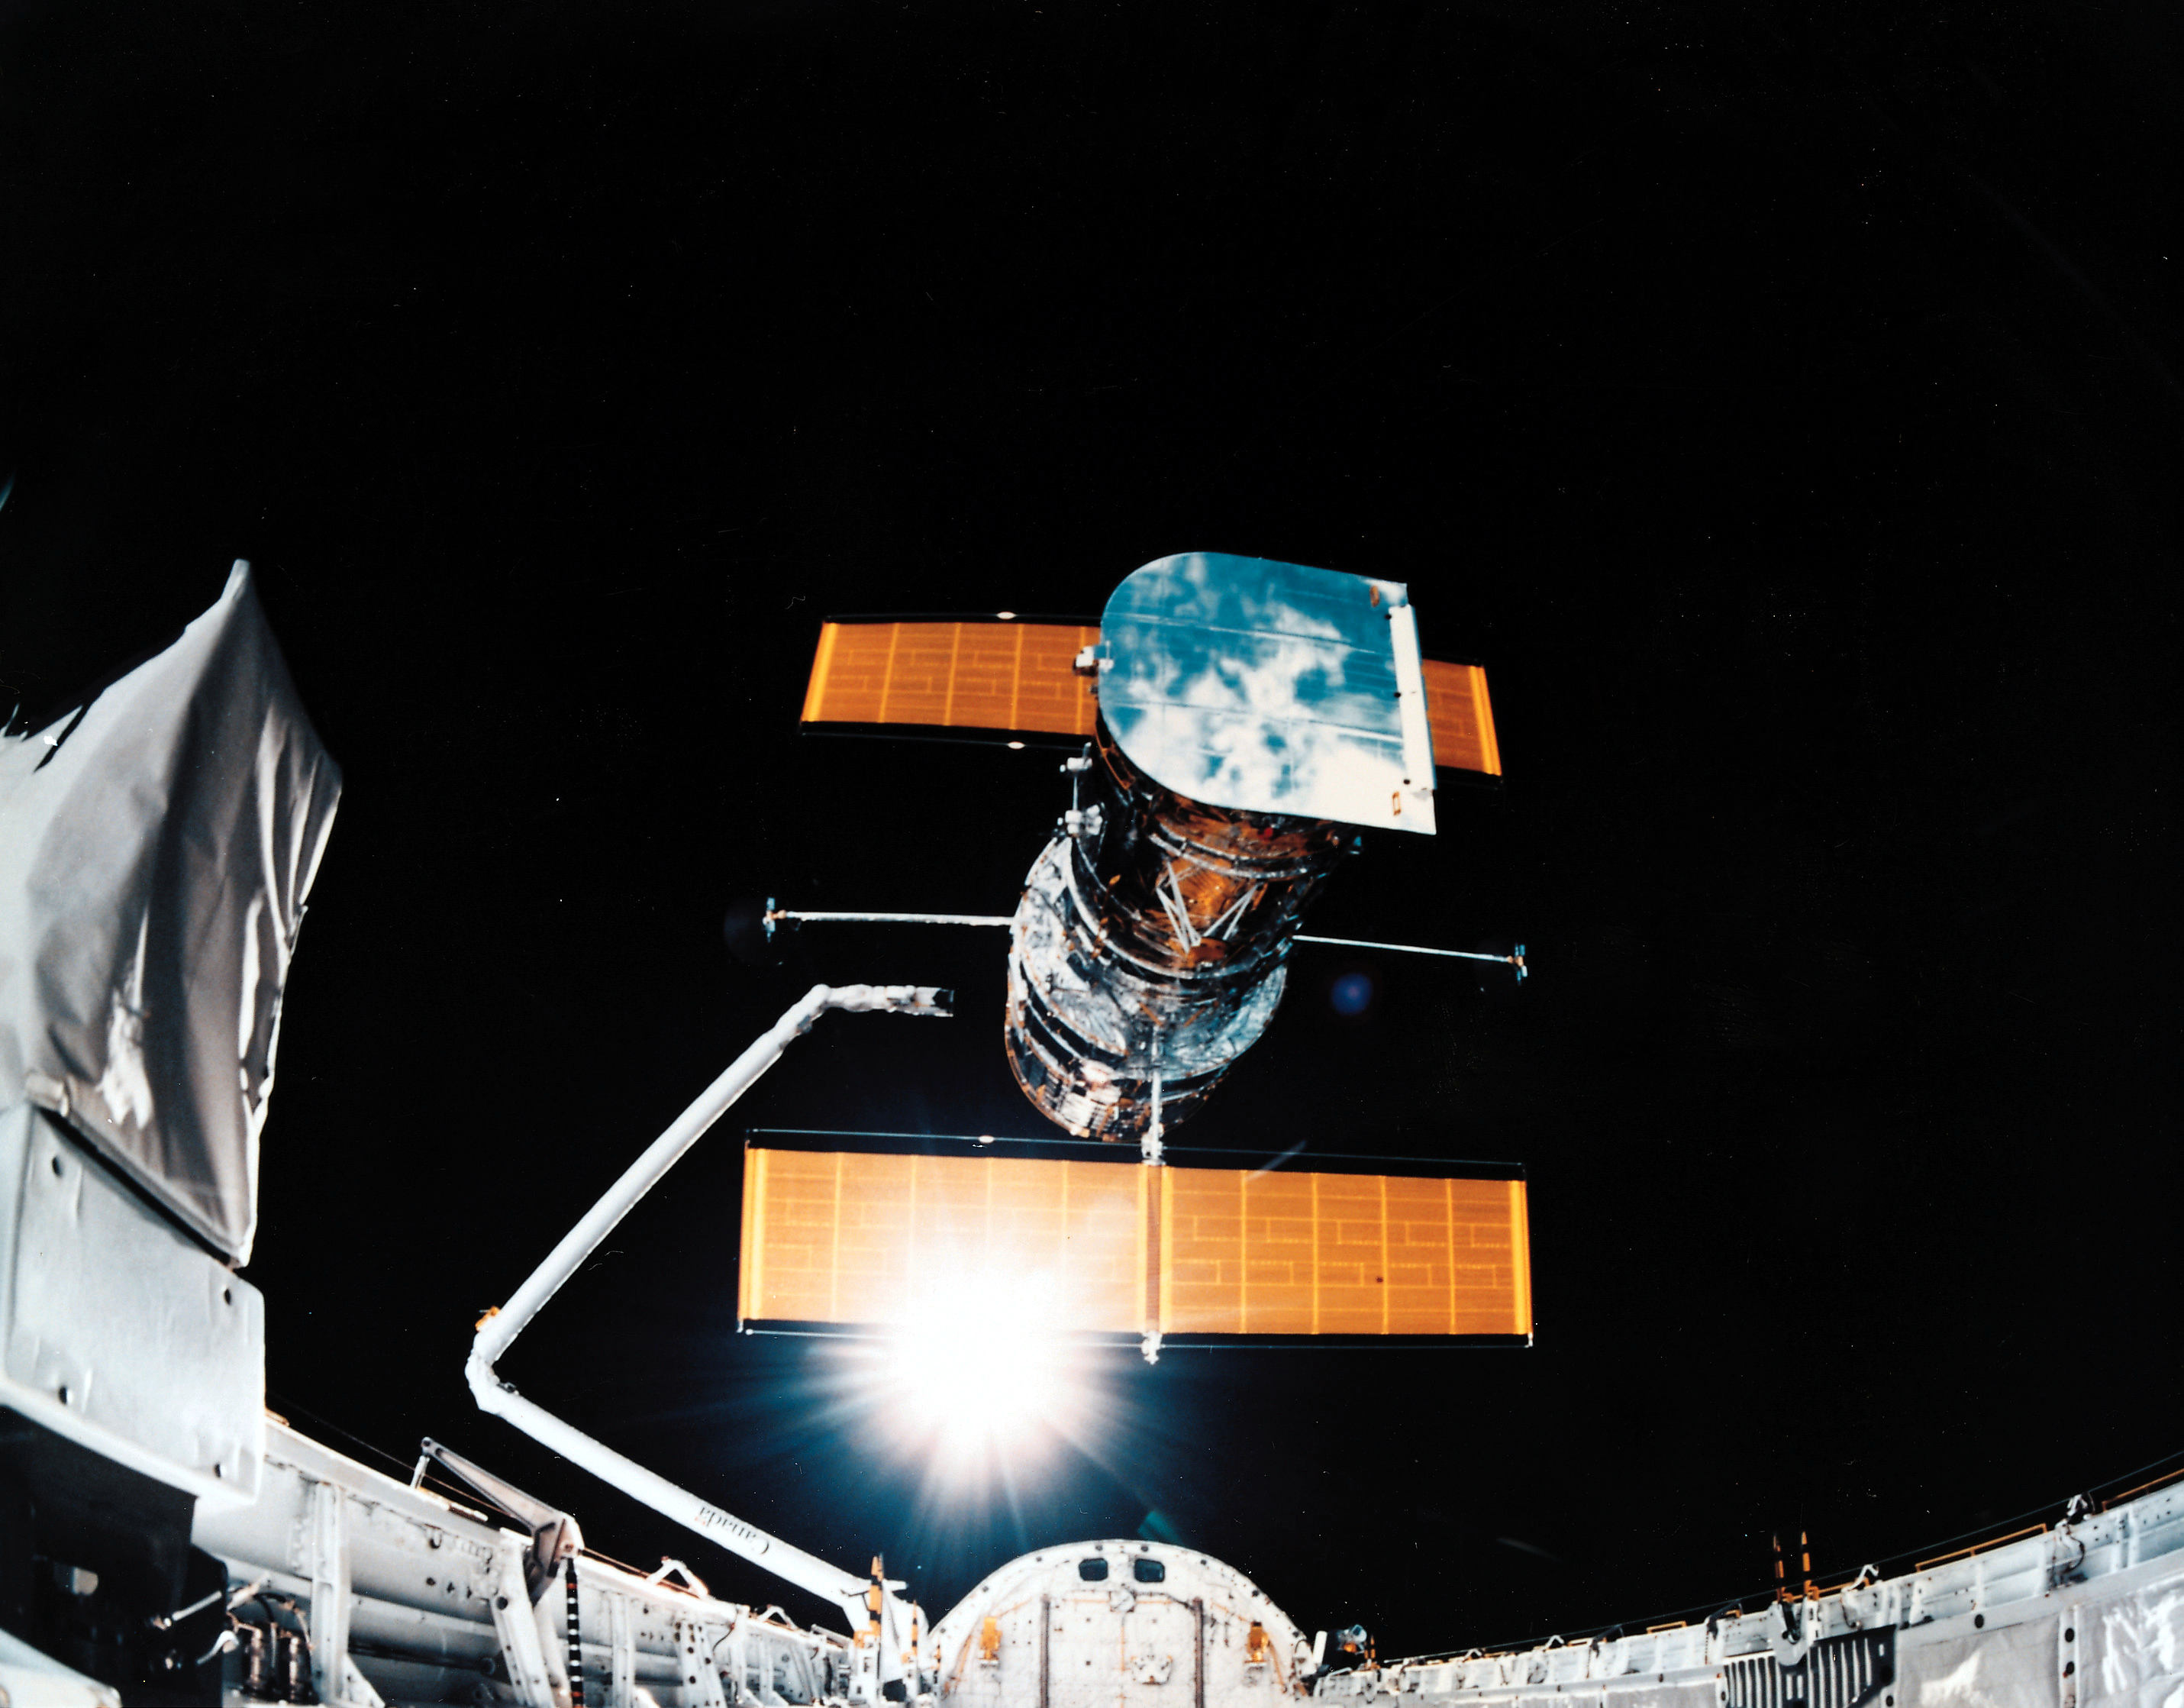

Sunburst between Hubble and Discovery

In this image we see a sunburst between the solar array of the Hubble Space Telescope (HST) and the Space Shuttle Discovery.

Credit: NASA/ESA